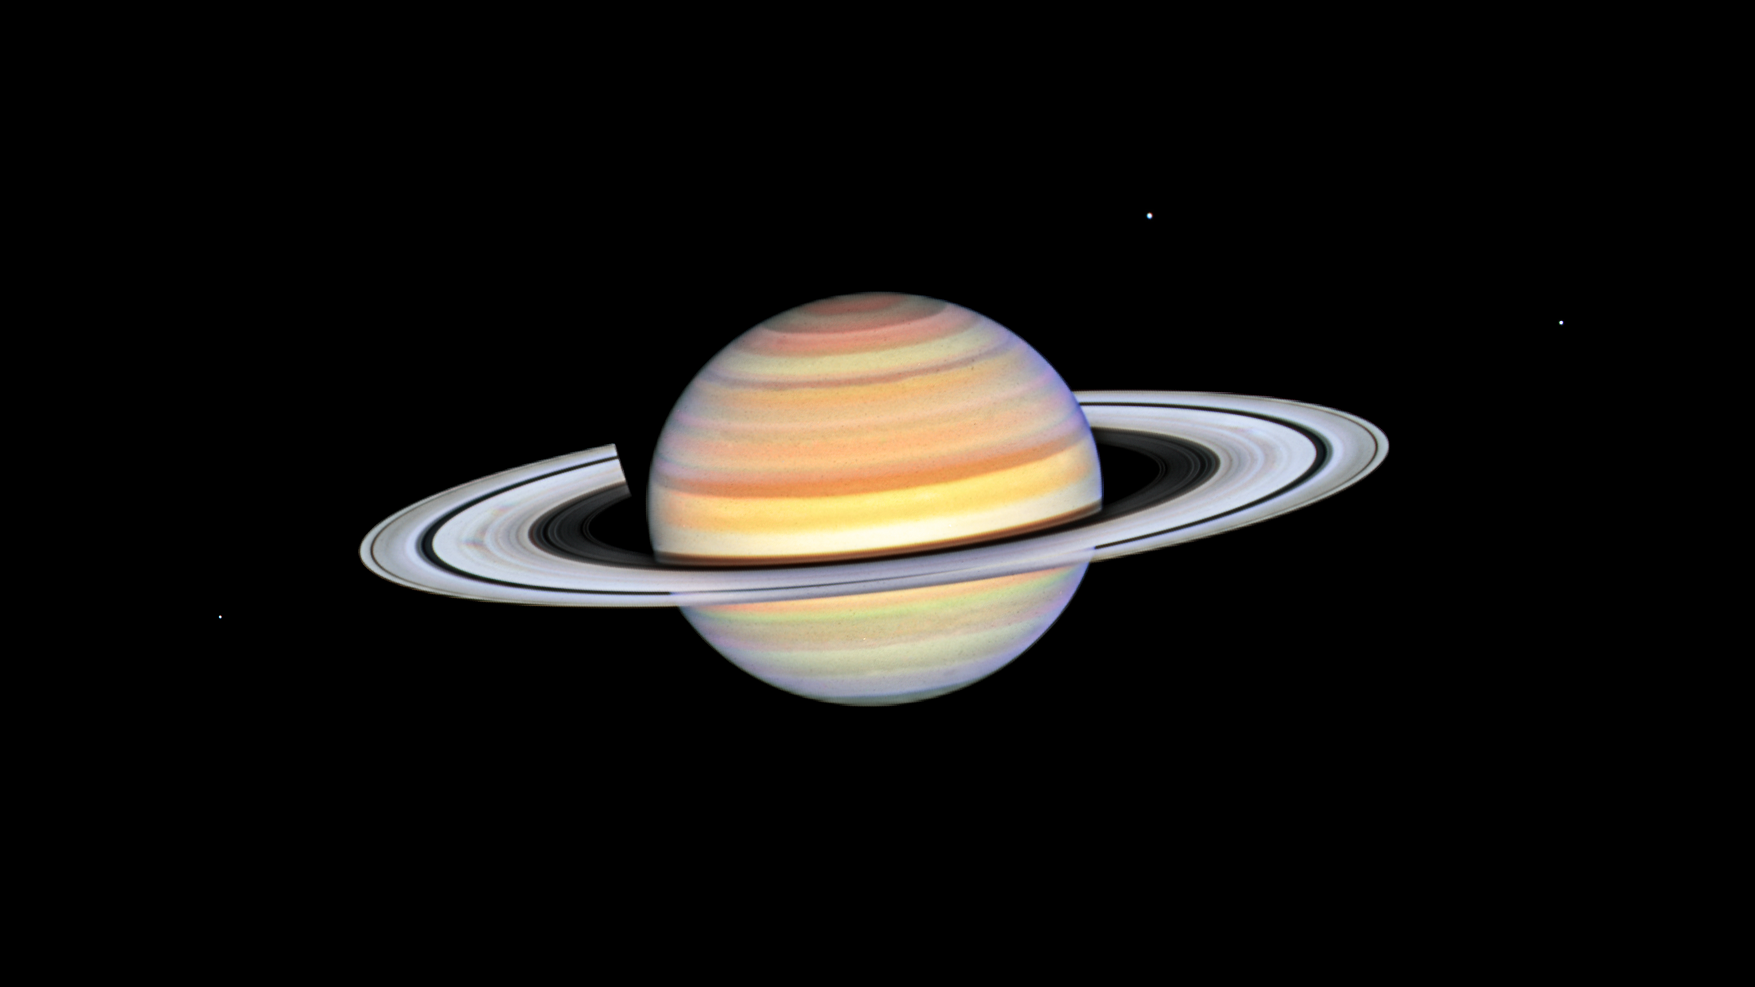

Saturn

This photo of Saturn was taken by the NASA/ESA Hubble Space Telescope on 22 October 2023, when the ringed planet was approximately 1365 million kilometres from Earth. Hubble's ultra-sharp vision reveals a phenomenon called ring spokes.

Saturn's spokes are transient features that rotate along with the rings. Their ghostly appearance only persists for two or three rotations around Saturn. During active periods, freshly-formed spokes continuously add to the pattern.

In 1981, NASA's Voyager 2 first photographed the ring spokes. Hubble continues observing Saturn annually as the spokes come and go. This cycle has been captured by Hubble's Outer Planets Atmospheres Legacy (OPAL) program that began nearly a decade ago to annually monitor weather changes on all four gas-giant outer planets.

Hubble's crisp images show that the frequency of spoke apparitions is seasonally driven, first appearing in OPAL data in 2021 but only on the morning (left) side of the rings. Long-term monitoring shows that both the number and contrast of the spokes vary with Saturn's seasons. Saturn is tilted on its axis like Earth and has seasons lasting approximately seven years.

This year, these ephemeral structures appear on both sides of the planet simultaneously as they spin around the giant world. Although they look small compared with Saturn, their length and width can stretch longer than Earth's diameter!

The OPAL team notes that the leading theory is that spokes are tied to interactions between Saturn's powerful magnetic field and the sun. Planetary scientists think that electrostatic forces generated from this interaction levitate dust or ice above the ring to form the spokes, though after several decades no theory perfectly predicts the spokes. Continued Hubble observations may eventually help solve the mystery.

Credit: NASA, ESA, STScI, A. Simon (NASA-GSFC)